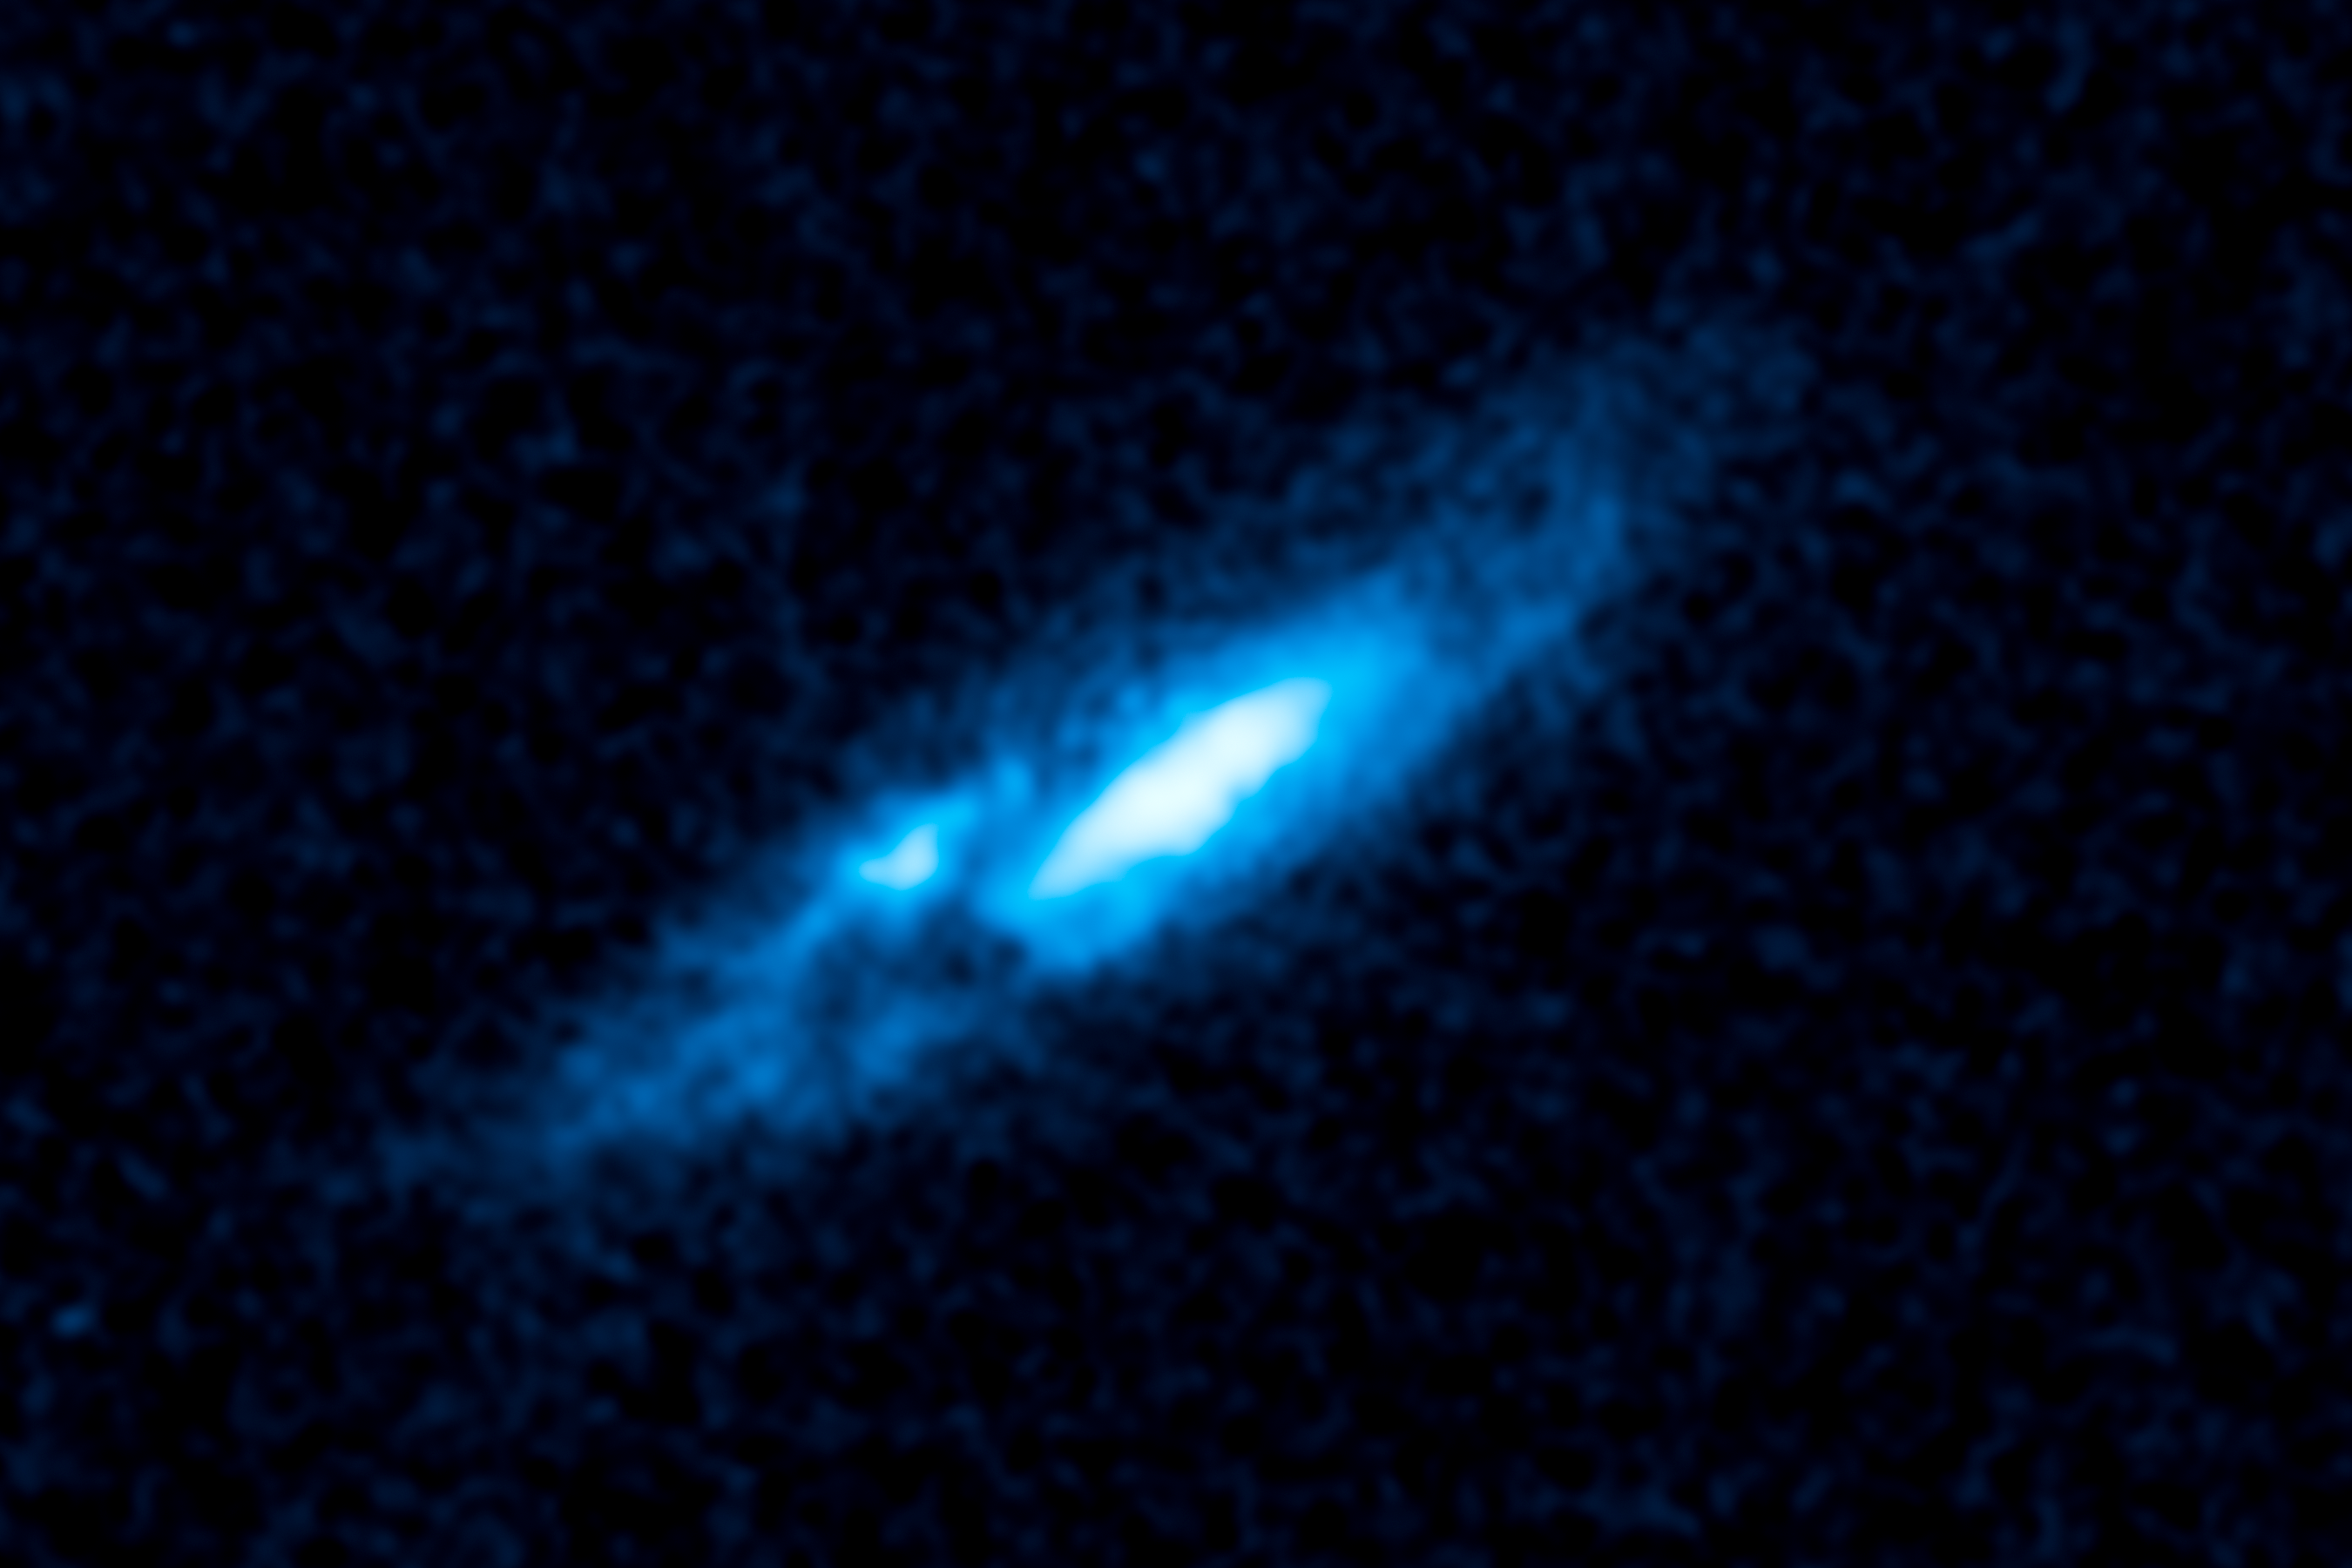

Hubble spies vast gas disk around unique massive star

This visible-light image taken by NASA's Hubble Space Telescope reveals a pancake-shaped disk of gas around an extremely bright star in our Milky Way galaxy. The disk glows brightly in the light of ionized nitrogen.

The central star is nicknamed "Nasty 1," derived from its catalogue name of NaSt1. Nasty 1 is thought to be a Wolf-Rayet star, a massive, rapidly evolving star weighing well over 10 times the mass of our Sun. The star is losing its hydrogen-filled outer layers quickly, exposing its super-hot and extremely bright helium-burning core.

Nasty 1 is thought to have a companion, and gravitational interactions between them may have created the gas disk. Both stars are heavily obscured by gas and dust in the disk. Hubble observations suggest that as Nasty 1 sheds its weight, some of the mass is falling onto a companion star and some is leaking into space, forming the disk. The vast structure is nearly 2 trillion miles wide. The disk is clumpy because astronomers think the outbursts occur sporadically. The knot at left of center is an unusually bright clump of gas. The image is tinted blue to bring out details in the disk.

Astronomers were surprised to find the disk-like structure, which has never been seen before around a Wolf-Rayet star in our galaxy. The star may represent a brief transitory stage in the evolution of massive stars.

The Nasty 1 system may be as close as 3,000 light-years from Earth.

The observations were taken in April 2013 with the Wide Field Camera 3.

Credit: NASA, ESA, and J. Mauerhan (University of California, Berkeley)